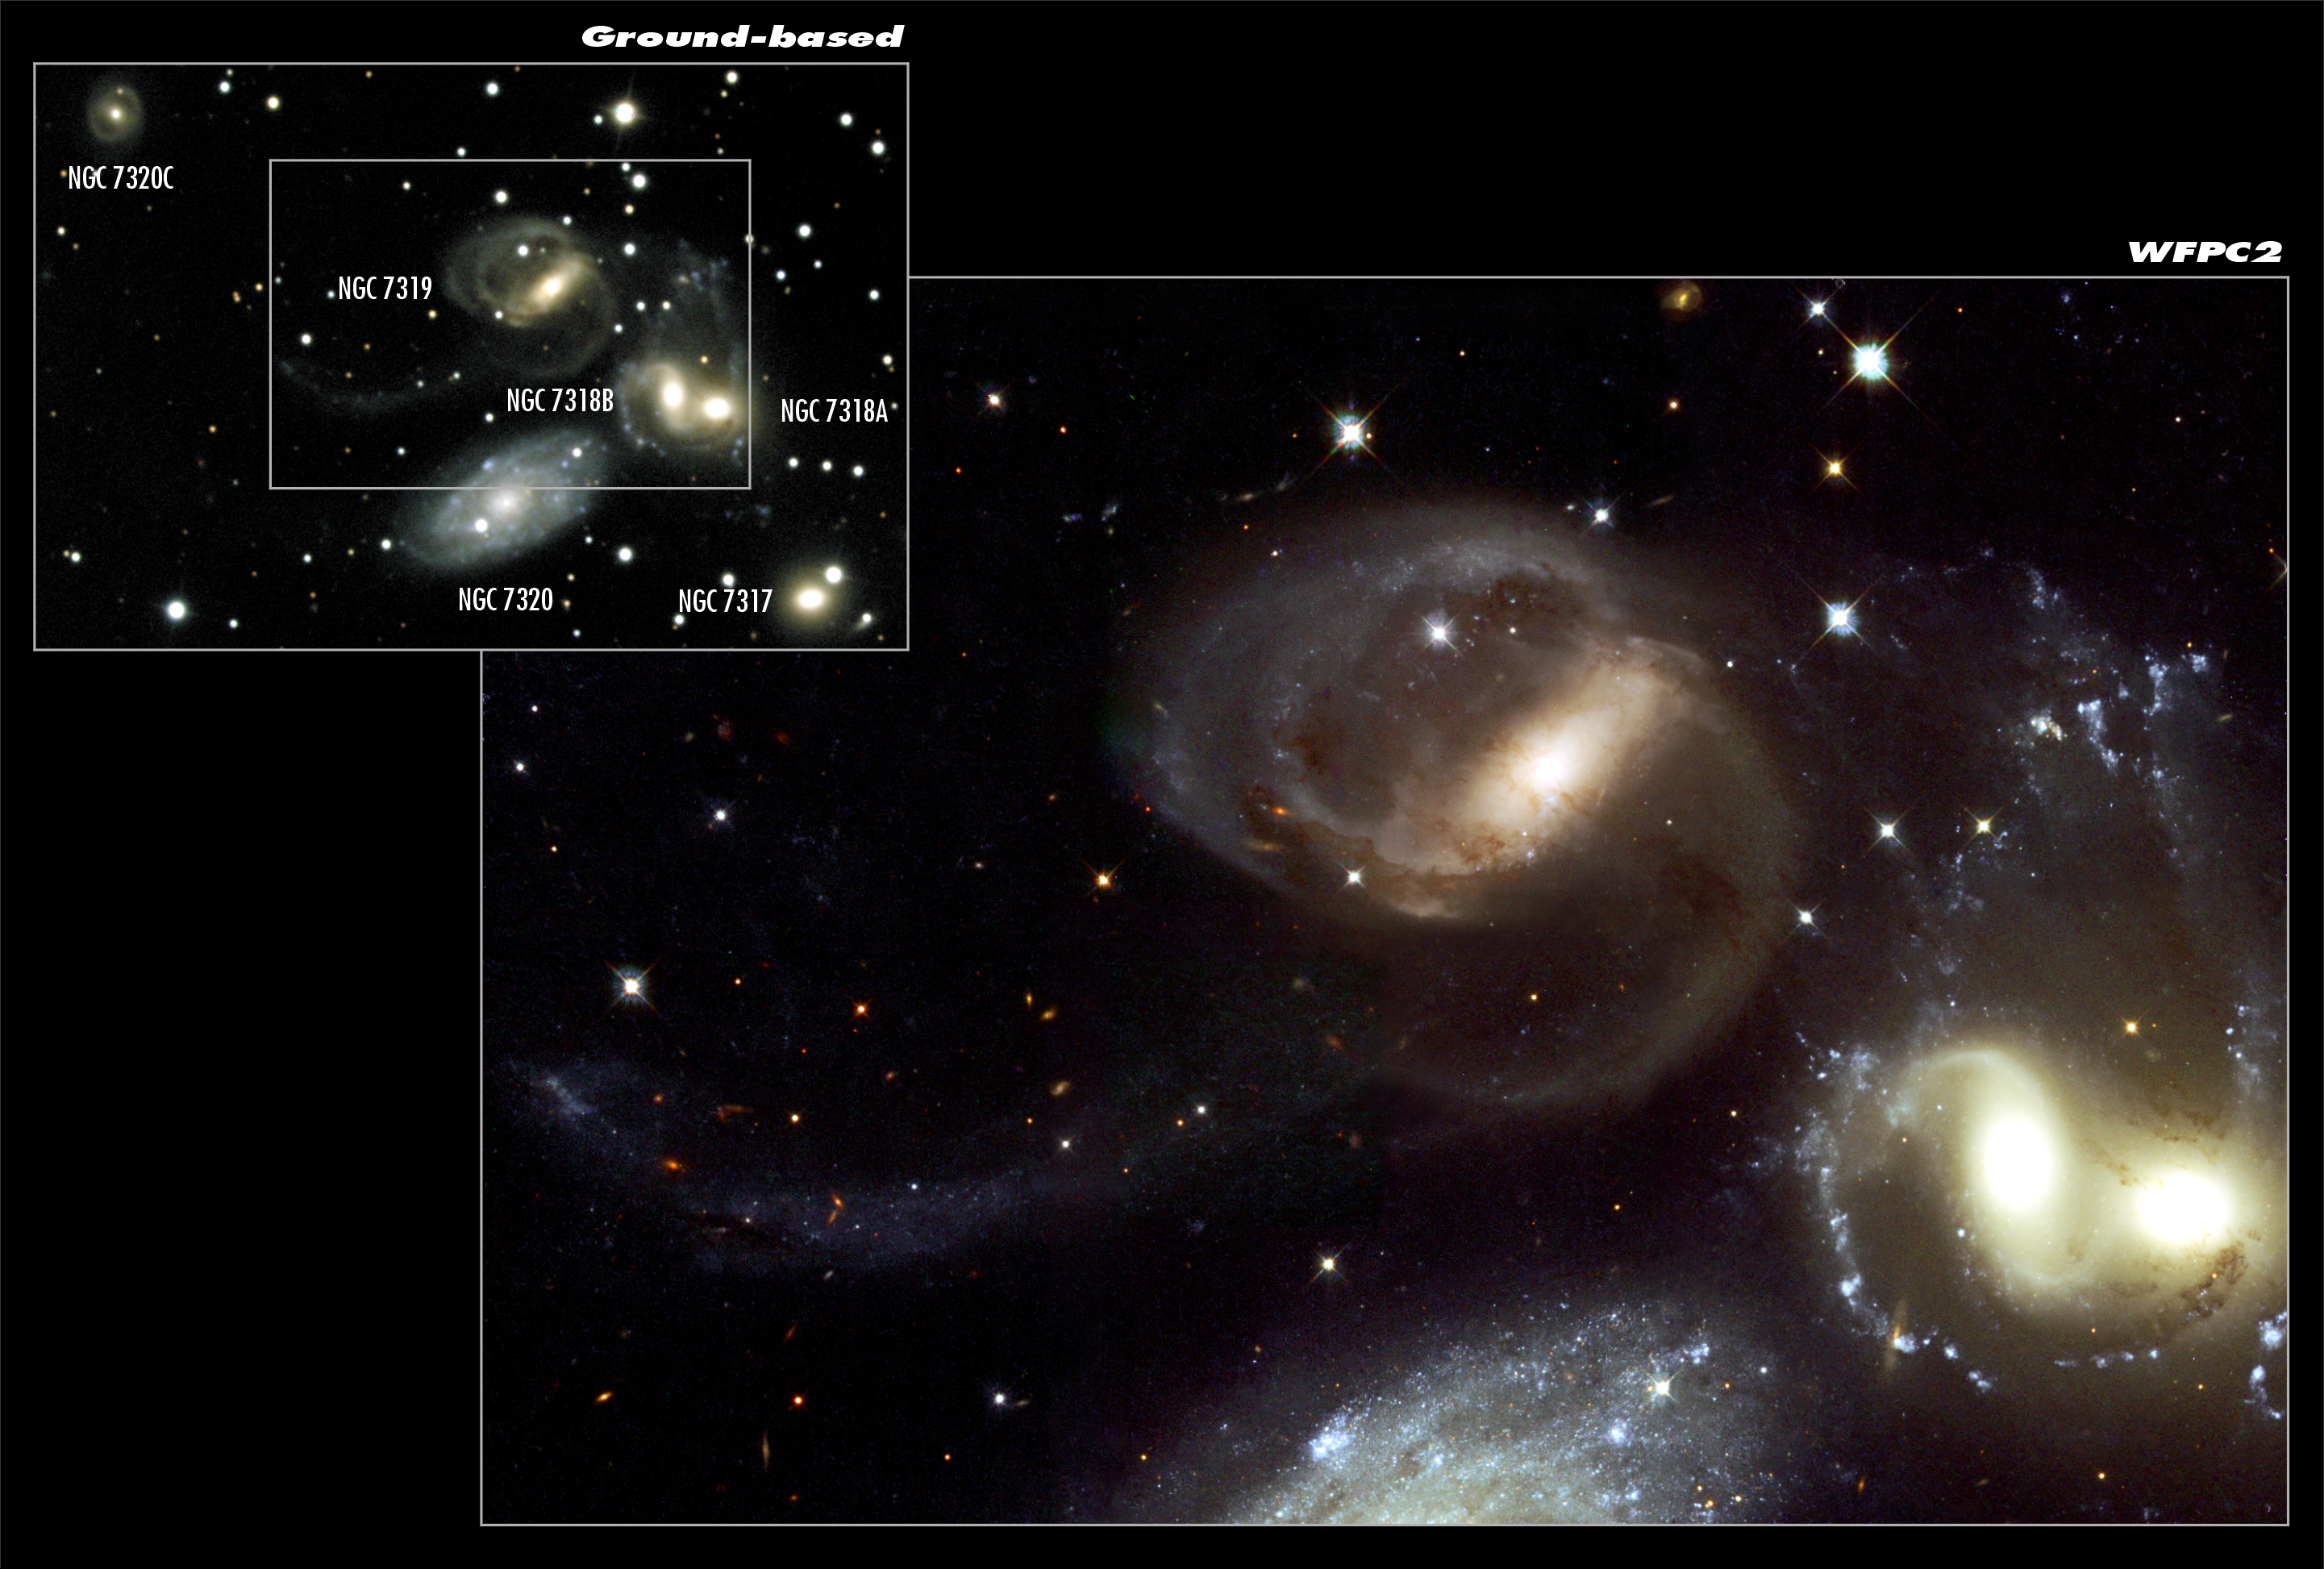

Stephan's Quintet - A Mammoth Cosmic Collision (composite)

This spectacular new image from the NASA/ESA Hubble Space Telescope of the group of galaxies called Stephan's Quintet has provided a detailed view of one of the most exciting star forming regions in the local Universe. Stephan's Quintet is a favoured object for amateur astronomers and has earned a reputation as a challenging target for good hobby telescopes. The quintet is a prototype of a class of objects known as compact groups of galaxies and has been studied intensively for decades. This NASA/ESA Hubble Space Telescope image is a close-up view of the central part of Stephan's Quintet, giving a magnificent view of a gigantic cosmic collision. Weird, highly distorted features, dust lanes crossing between galaxies and long filaments of stars and gas extending far beyond the central regions all suggest galaxies twisted by violent encounters. The galaxies float through space, distorted shapes moulded by tidal interactions, weaving together in the intricate figures of an immense cosmic dance, choreographed by gravity. The ground-based view to the left provides an overview of Stephan's Quintet.

Credit: ESA & NOAO